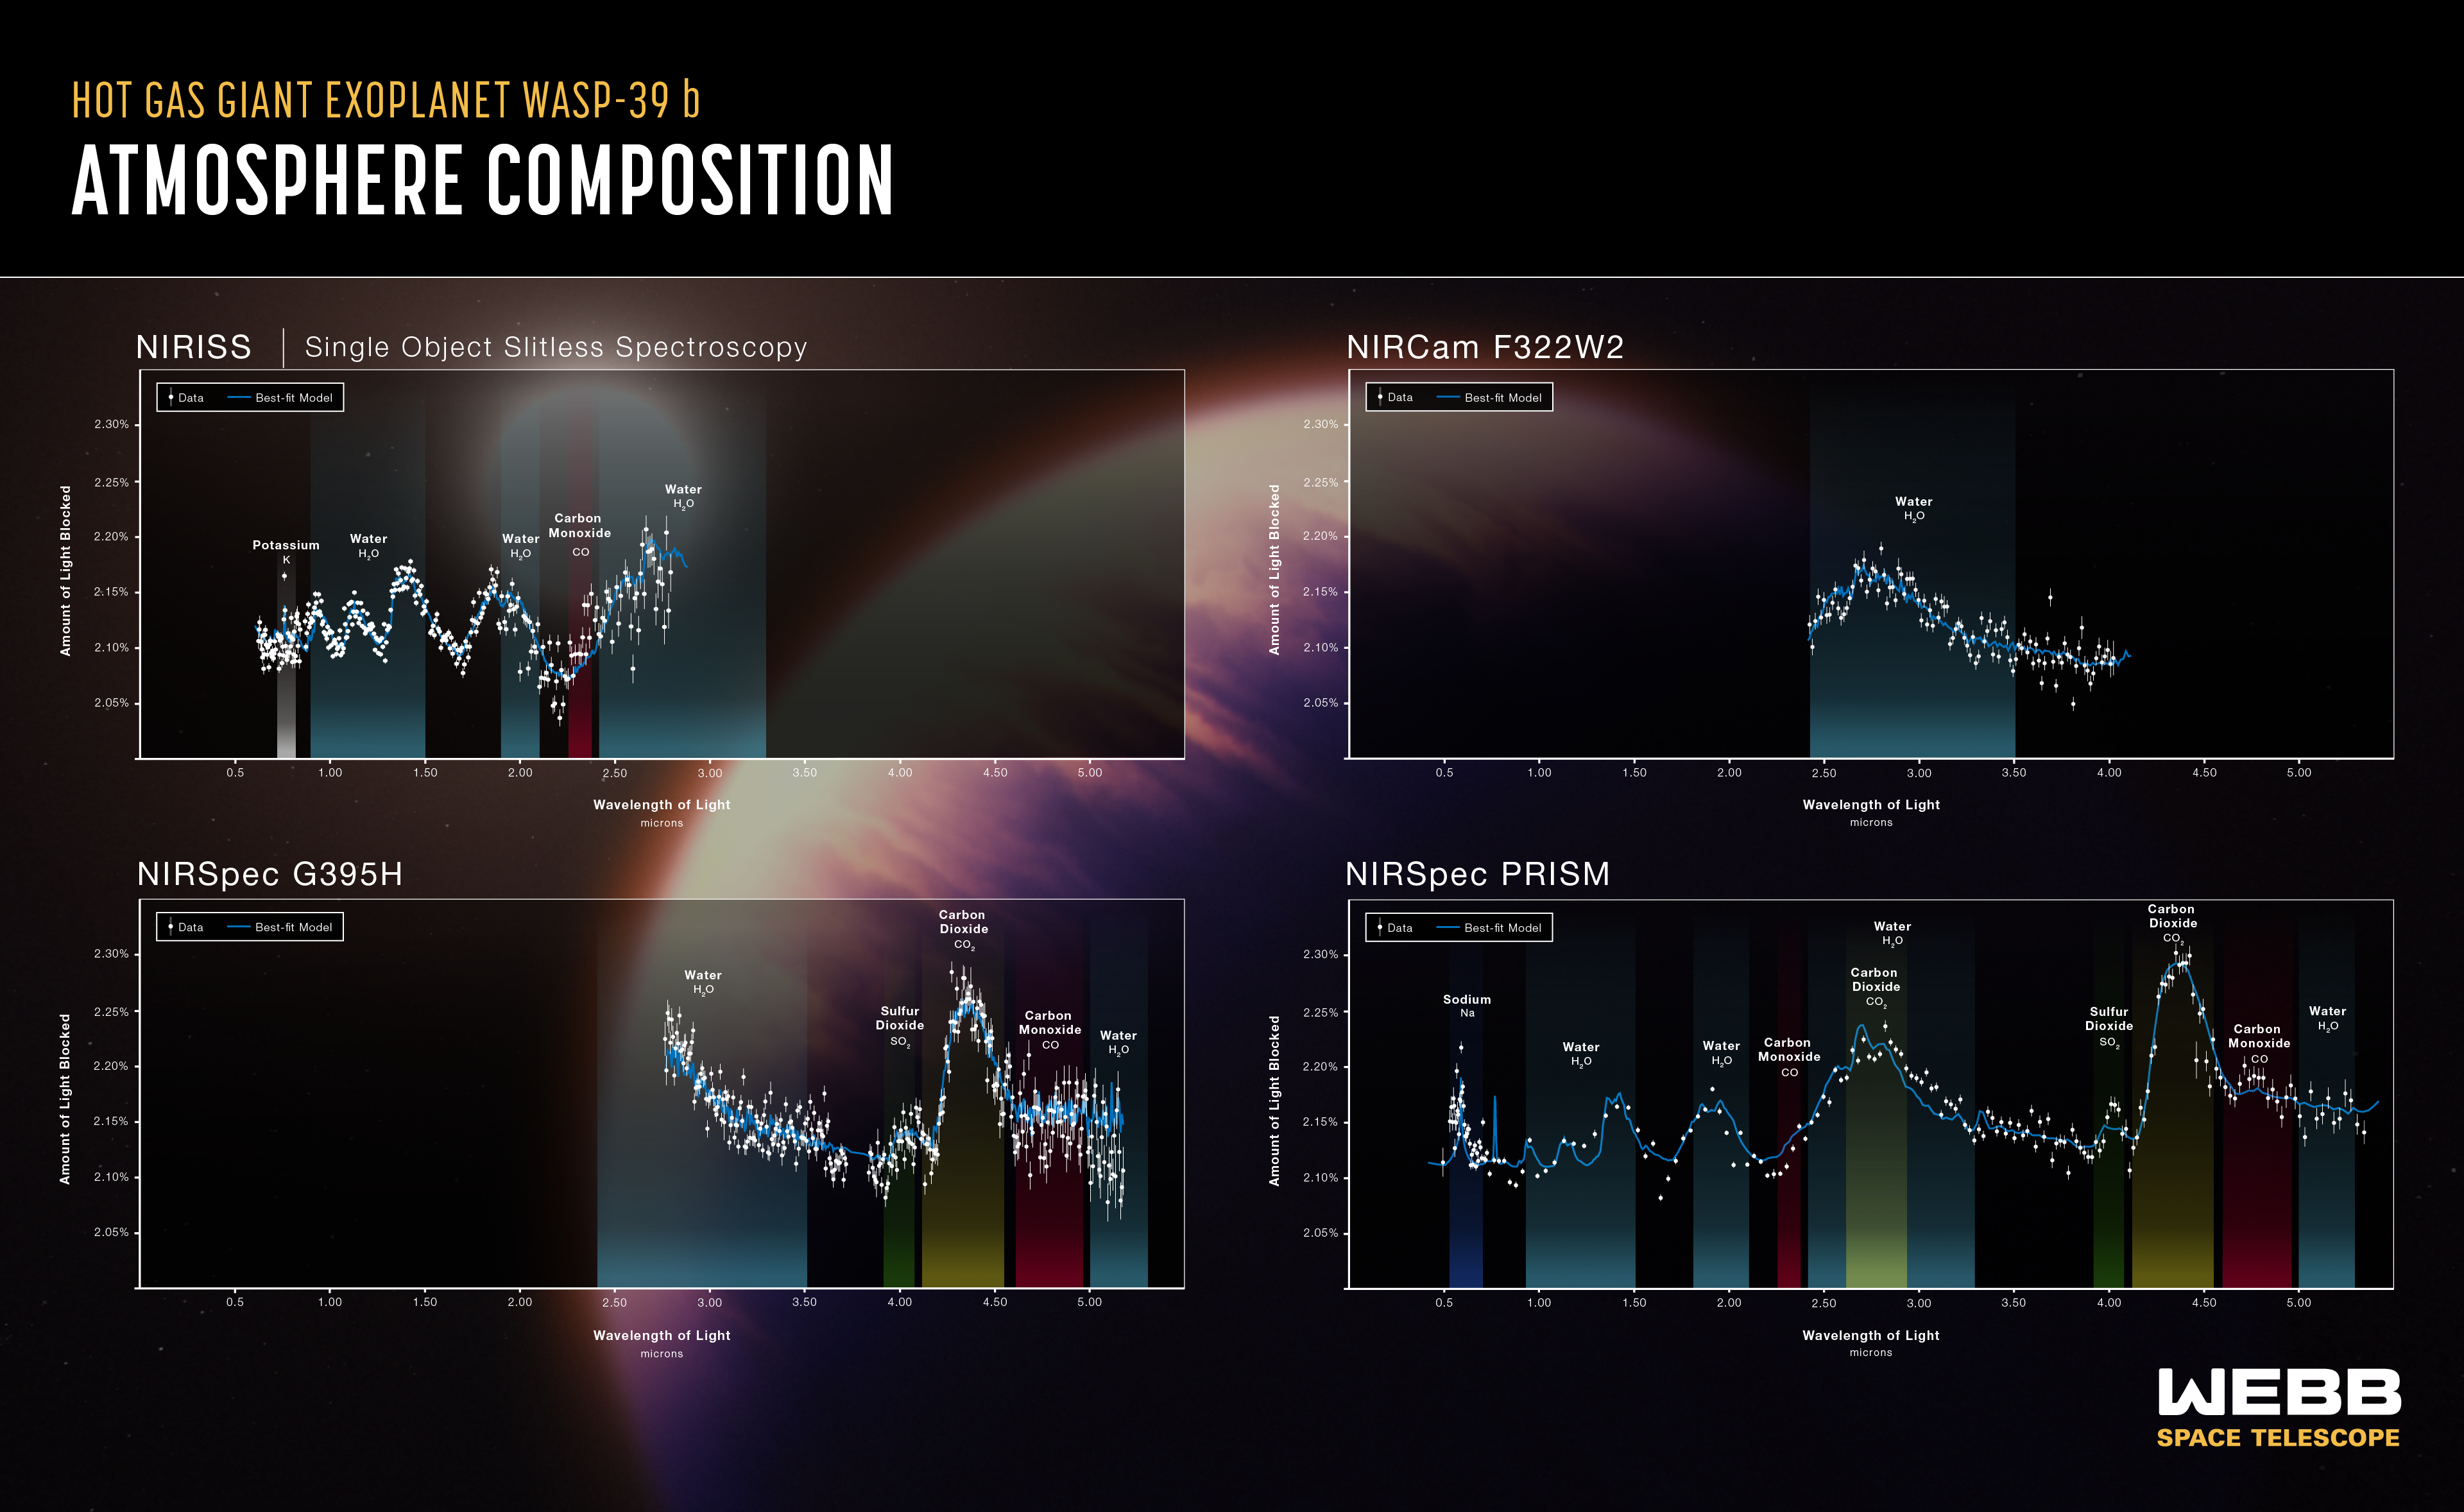

WASP-39 b Atmospheric Composition (NIRSpec, NIRCam and NIRISS)

The atmospheric composition of the hot gas giant exoplanet WASP-39 b has been revealed by the NASA/ESA/CSA James Webb Space Telescope. This graphic shows four transmission spectra from three of Webb’s instruments operated in four instrument modes. All are plotted on a common scale extending from 0.5 to 5.5 microns.

A transmission spectrum is made by comparing starlight filtered through a planet’s atmosphere as it moves in front of the star, to the unfiltered starlight detected when the planet is beside the star. Each of the data points (white circles) on these graphs represents the amount of a specific wavelength of light that is blocked by the planet and absorbed by its atmosphere. Wavelengths that are preferentially absorbed by the atmosphere appear as peaks in the transmission spectrum.

The blue line is a best-fit model that takes into account the data, the known properties of WASP-39 b and its star (e.g., size, mass, temperature), and assumed characteristics of the atmosphere. Researchers can vary the parameters in the model – changing unknown characteristics like cloud height in the atmosphere and abundances of various gases – to get a better fit and further understand what the atmosphere is really like.

At upper left, data from NIRISS shows fingerprints of potassium (K), water (H2O), and carbon monoxide (CO). At upper right, data from NIRCam shows a prominent water signature. At lower left, data from NIRSpec indicates water, sulfur dioxide (SO2), carbon dioxide (CO2), and carbon monoxide (CO). At lower right, additional NIRSpec data reveals all of these molecules as well as sodium (Na).

Credit: NASA, ESA, CSA, J. Olmsted (STScI)